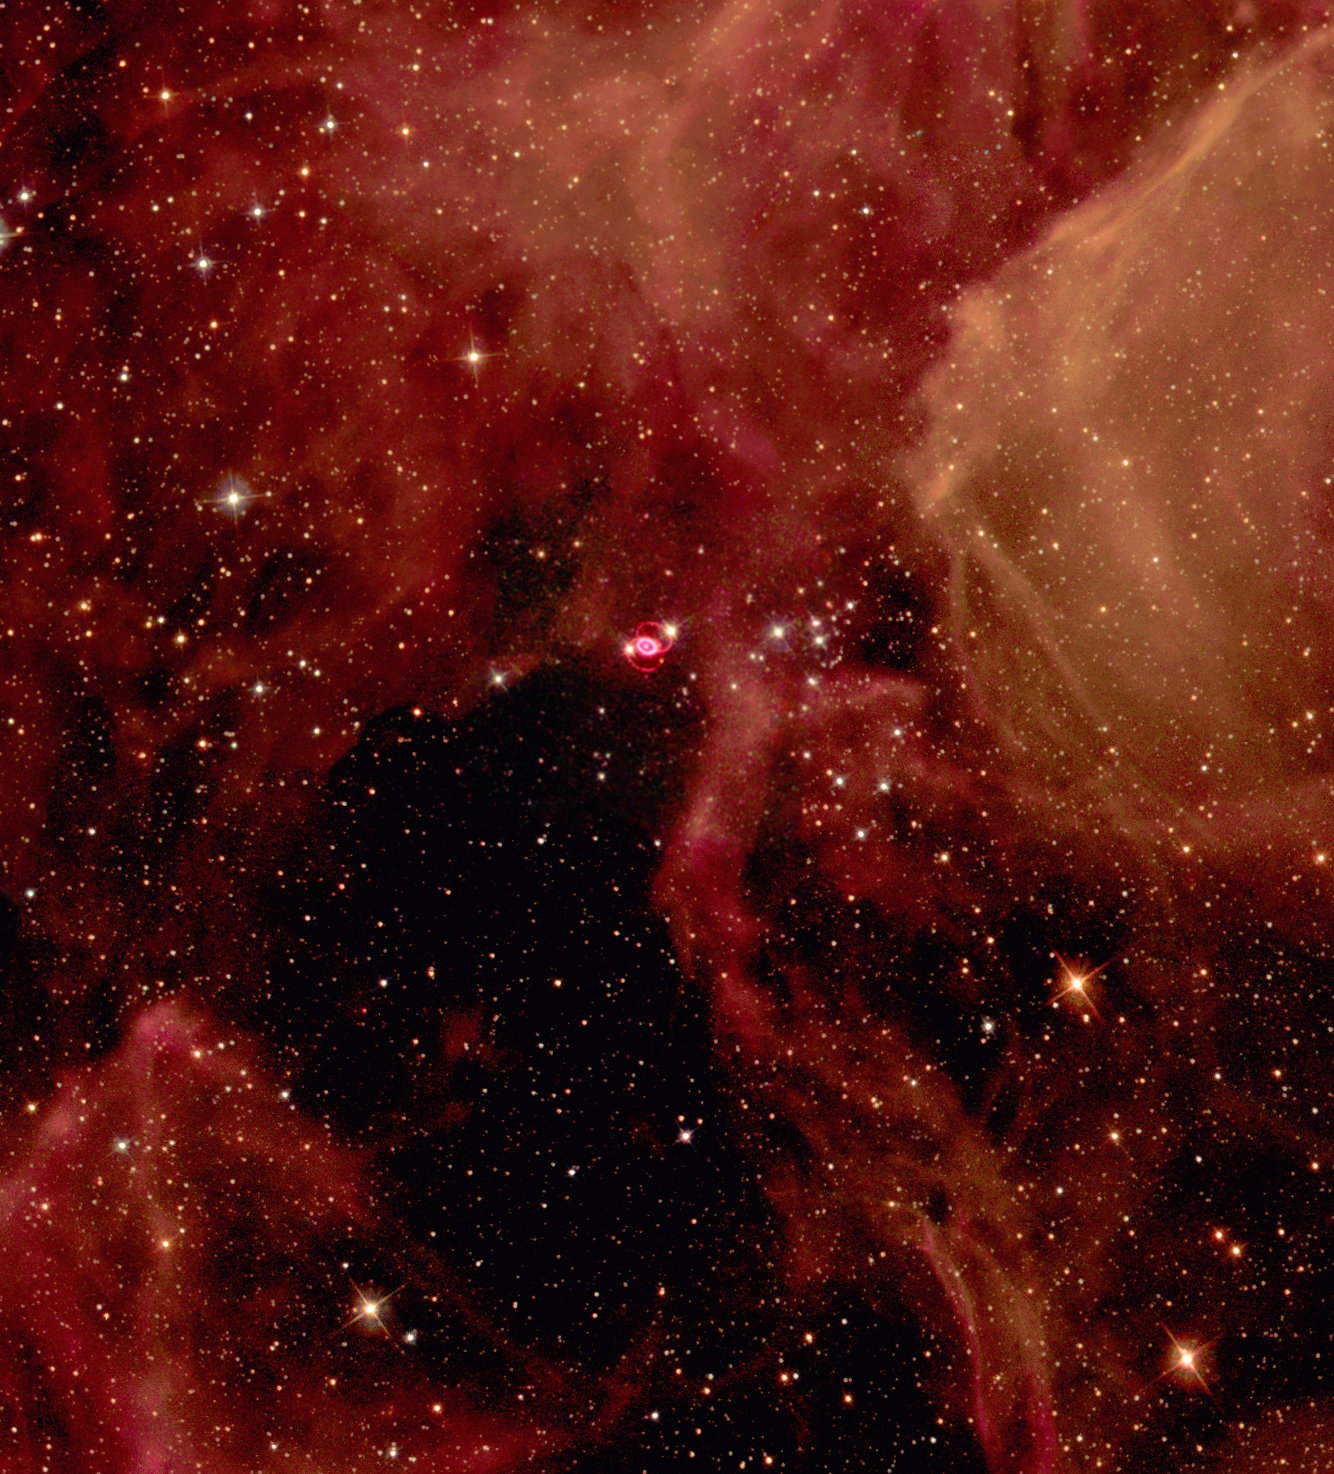

SN 1987a in the Large Magellanic Cloud

Glittering stars and wisps of gas create a breathtaking backdrop for the self-destruction of a massive star, called supernova 1987A, in the Large Magellanic Cloud, a nearby galaxy. Astronomers in the Southern hemisphere witnessed the brilliant explosion of this star on Feb. 23, 1987.

Shown in this NASA/ESA Hubble Space Telescope image, the supernova remnant, surrounded by inner and outer rings of material, is set in a forest of ethereal, diffuse clouds of gas. This three-color image is composed of several pictures of the supernova and its neighboring region taken with the Wide Field and Planetary Camera 2 in Sept. 1994, Feb. 1996 and July 1997.

Credit: Hubble Heritage Team (AURA/STScI/NASA/ESA)